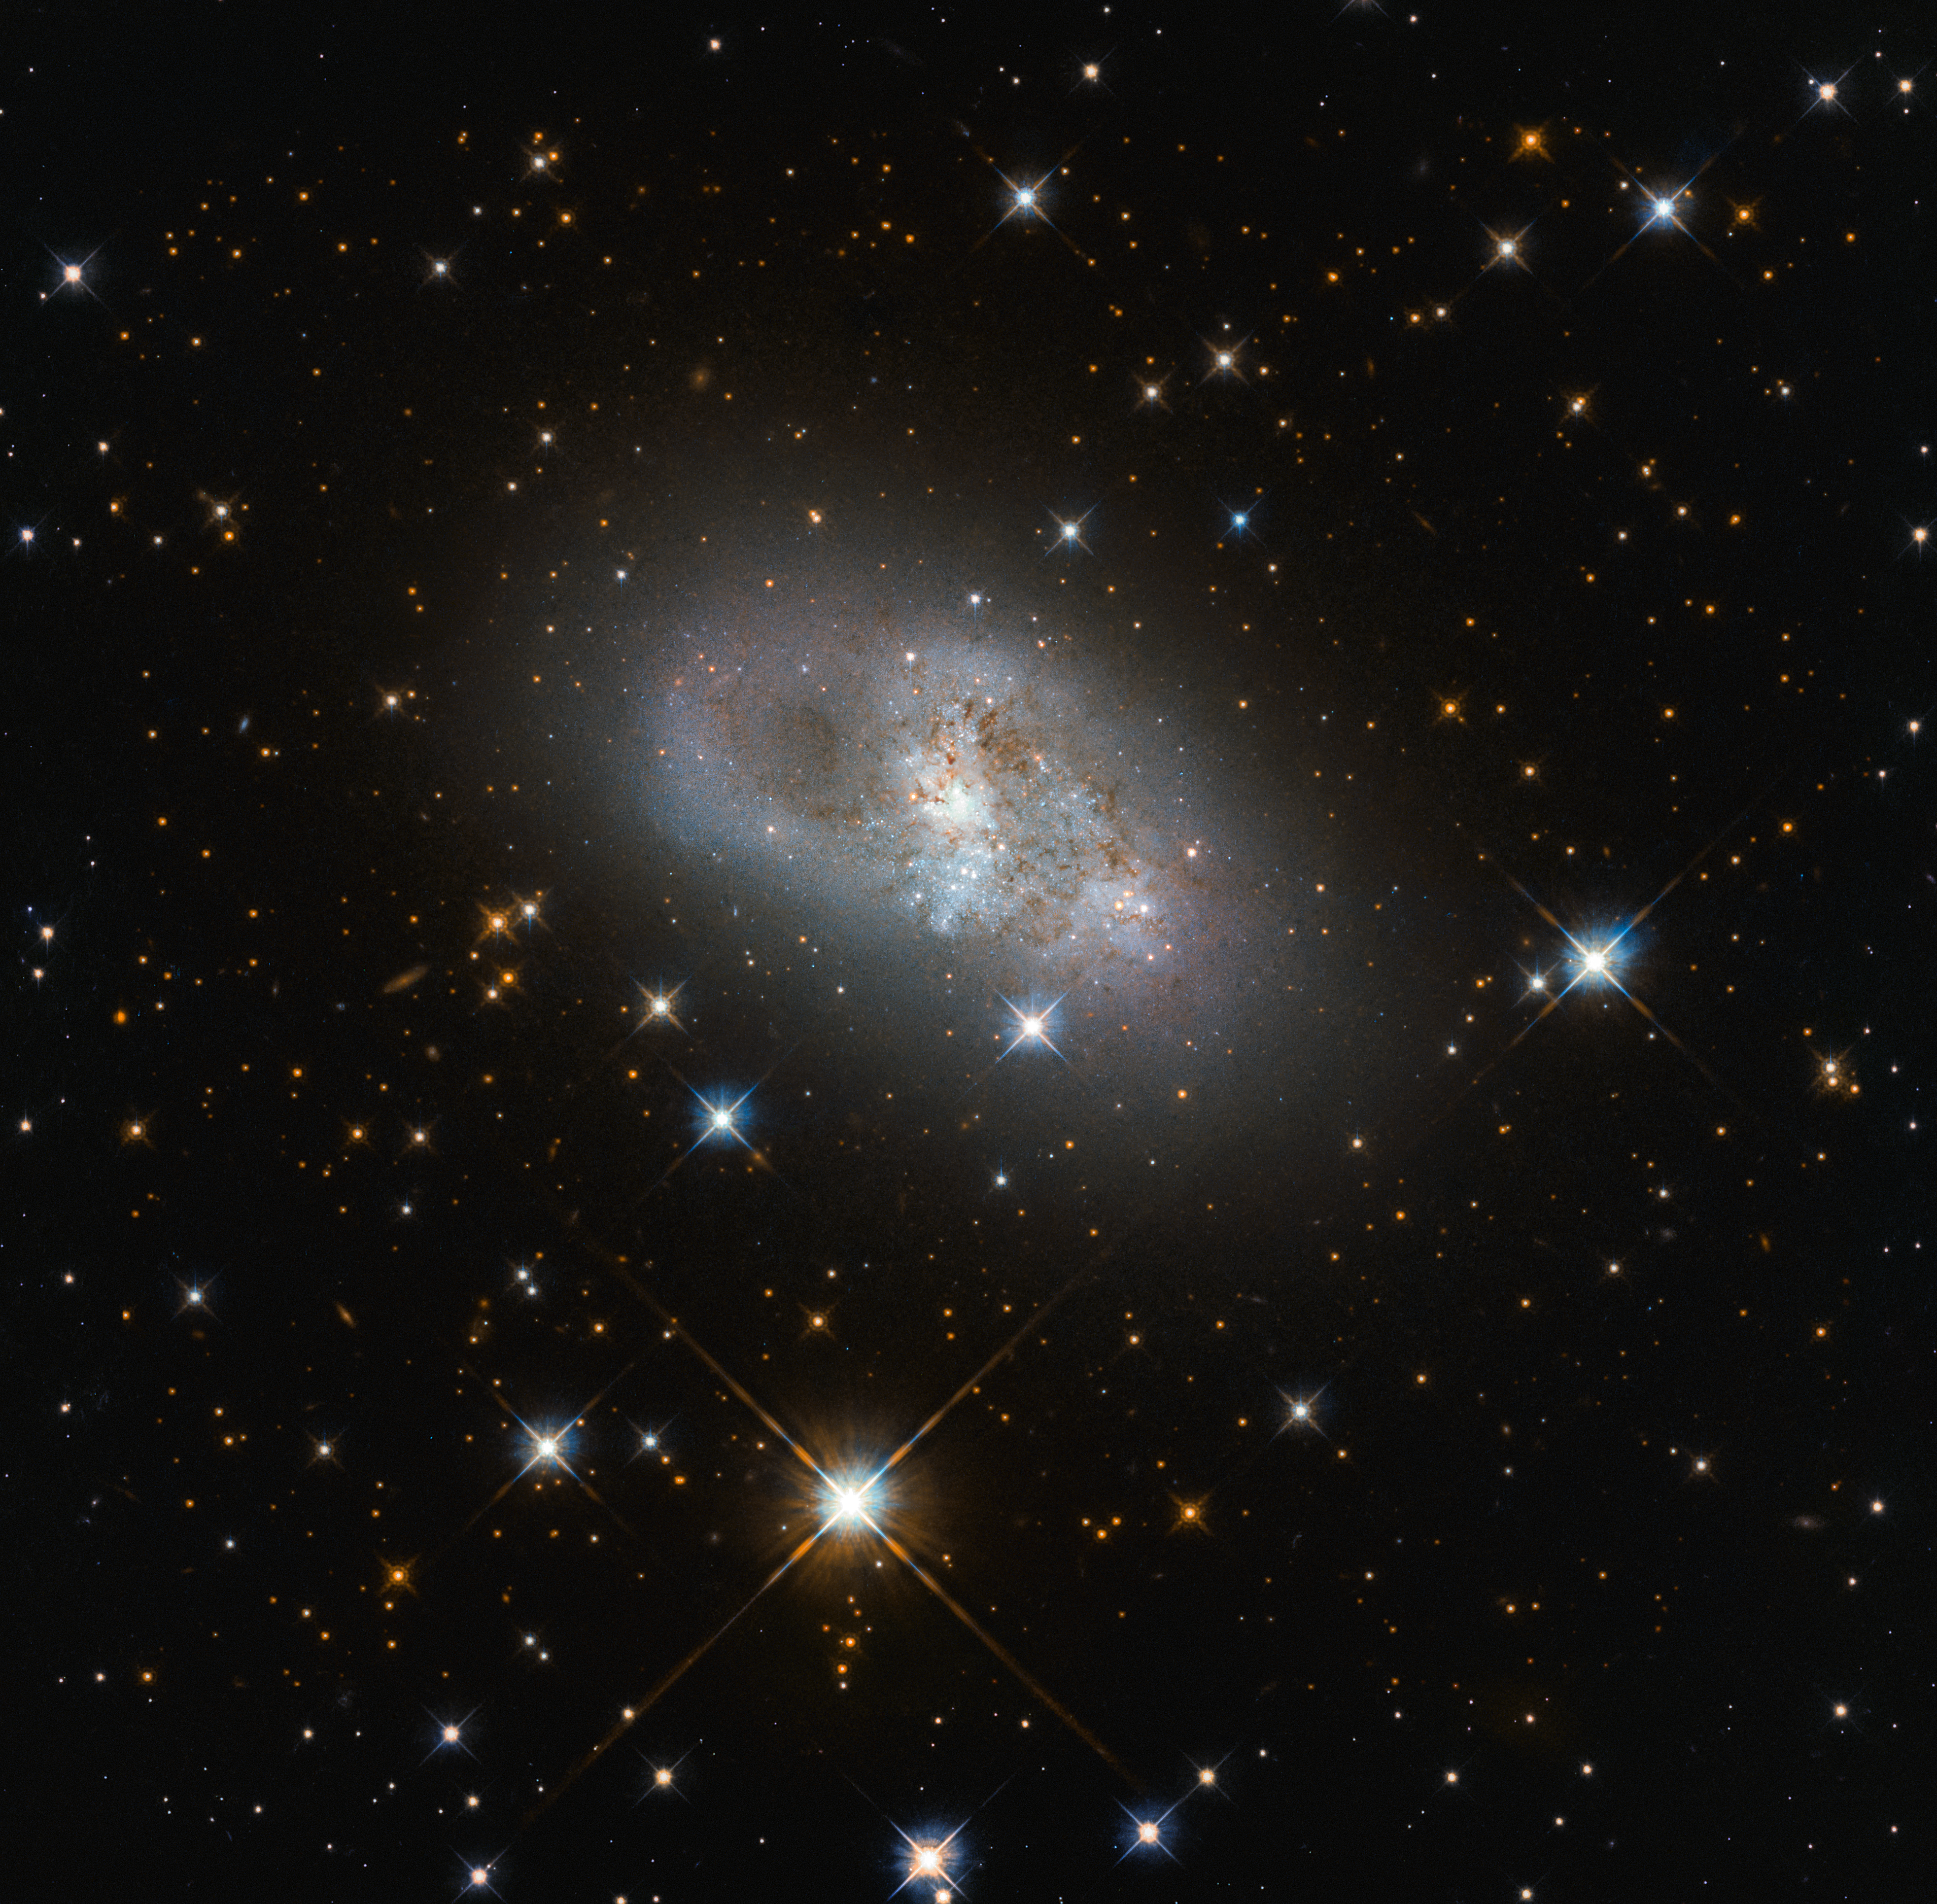

A Familiar Sight

This image from the NASA/ESA Hubble Space Telescope shows IC 4653, a galaxy just above 80 million light-years from Earth. That may sound like quite a distance, but it’s not that far on a cosmic scale. At these kinds of distances, the types and structures of the objects we see are similar to those in our local area.

Thie galaxy's whirling arms tells us a story about what’s happening inside this galaxy. Stars are generally brighter and bluer when they are younger, so the blue patches mark sites of new star formation. Studying the structures of other galaxies is a key way to learn about the structure of our own, given that humans can’t leave the Milky Way to look back and see what it looks like from the outside. It helps to compare our observations of our home galaxy with those of nearby galaxies we can see in their entirety.

Credit: ESA/Hubble & NASA, D. Rosario (CEA, Durham University)